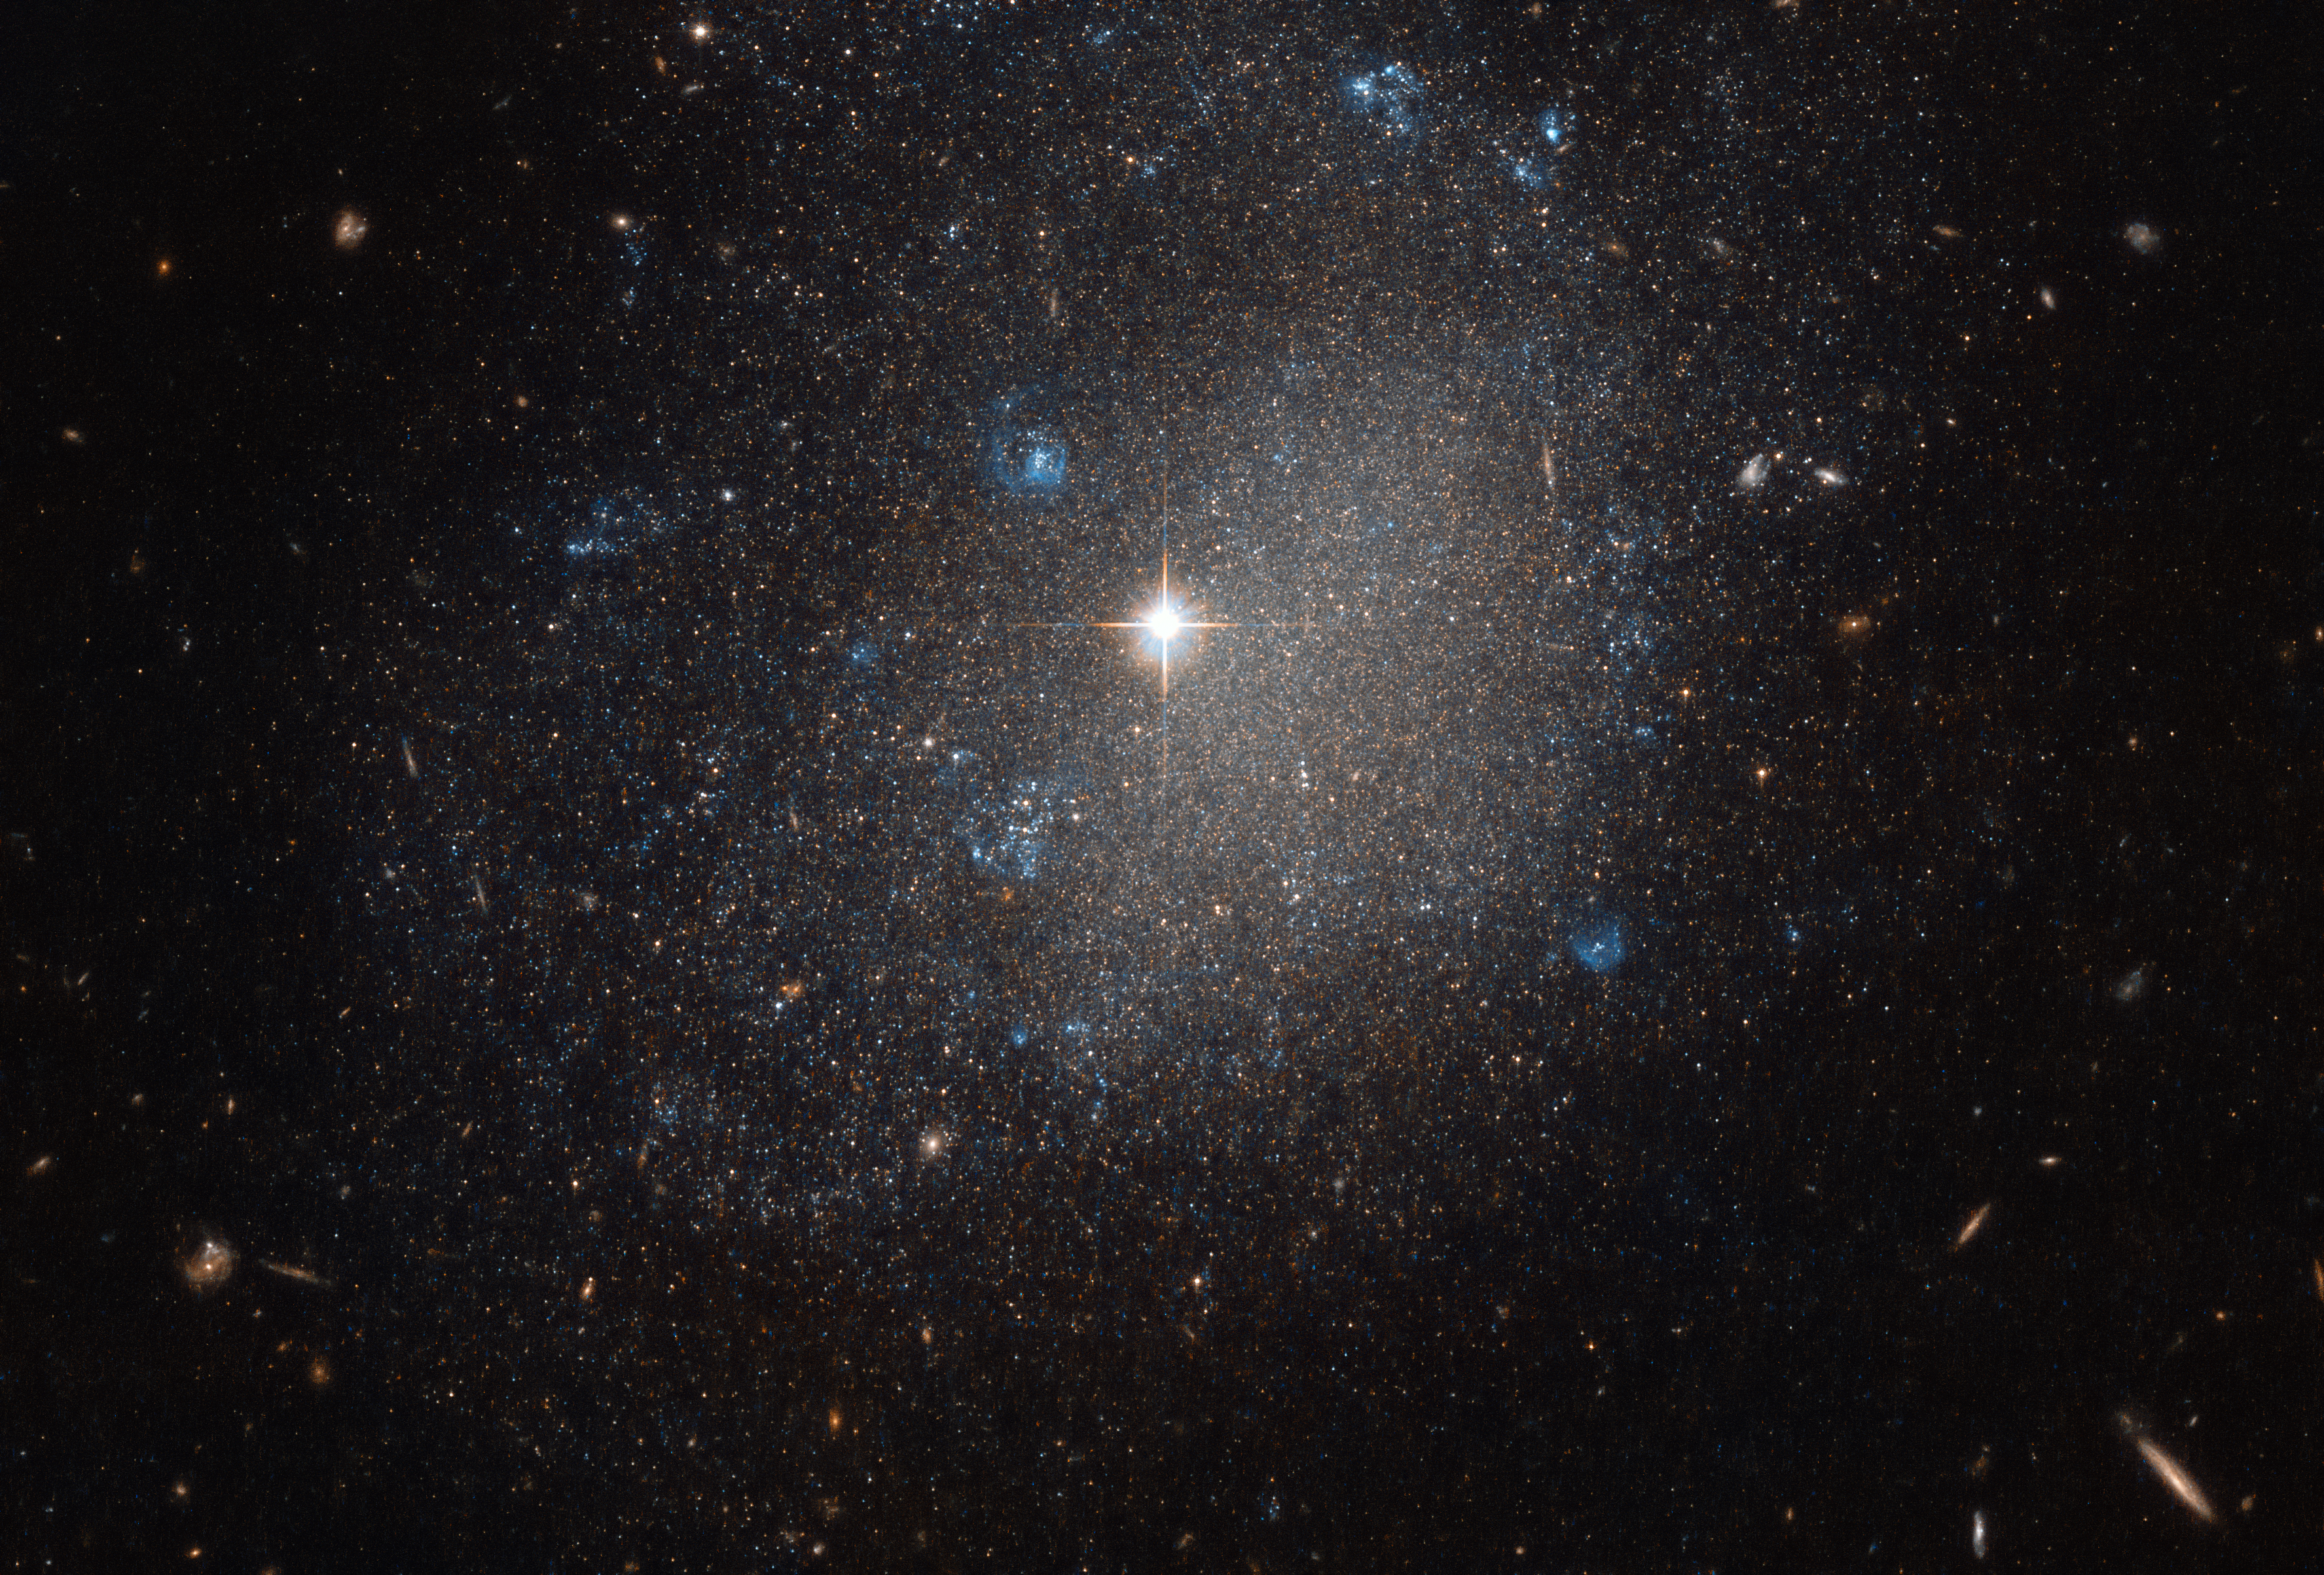

Astro-pointillism

On a clear evening in April of 1789, the renowned astronomer William Herschel continued his unrelenting survey of the night sky, hunting for new cosmic objects — and found cause to celebrate! Lengthening his impressive list of cosmic discoveries yet again, the astronomer spotted this bright spiral galaxy, named NGC 4707, lurking in the constellation of Canes Venatici (The Hunting Dog). NGC 4707 lies roughly 22 million light-years from Earth.

Over two centuries later, the NASA/ESA Hubble Space Telescope is able to view the same galaxy in far greater detail than Herschel could, allowing us to appreciate the intricacies and characteristics of NGC 4707 as never before. This striking image comprises observations from Hubble’s Advanced Camera for Surveys (ACS), one of a handful of high-resolution instruments currently aboard the space telescope.

Herschel himself reportedly described NGC 4707 as a “small, stellar” galaxy; while it is classified as a spiral (type Sm), its overall shape, centre, and spiral arms are very loose and undefined, and its central bulge is either very small or non-existent. It instead appears as a rough sprinkling of stars and bright flashes of blue on a dark canvas, as if a pointillist painter had dotted the cosmos with small pinpricks of bright paint.

The blue smudges seen across the frame highlight regions of recent or ongoing star formation, with newborn stars glowing in bright, intense shades of cyan and turquoise.

Credit: ESA/Hubble & NASA